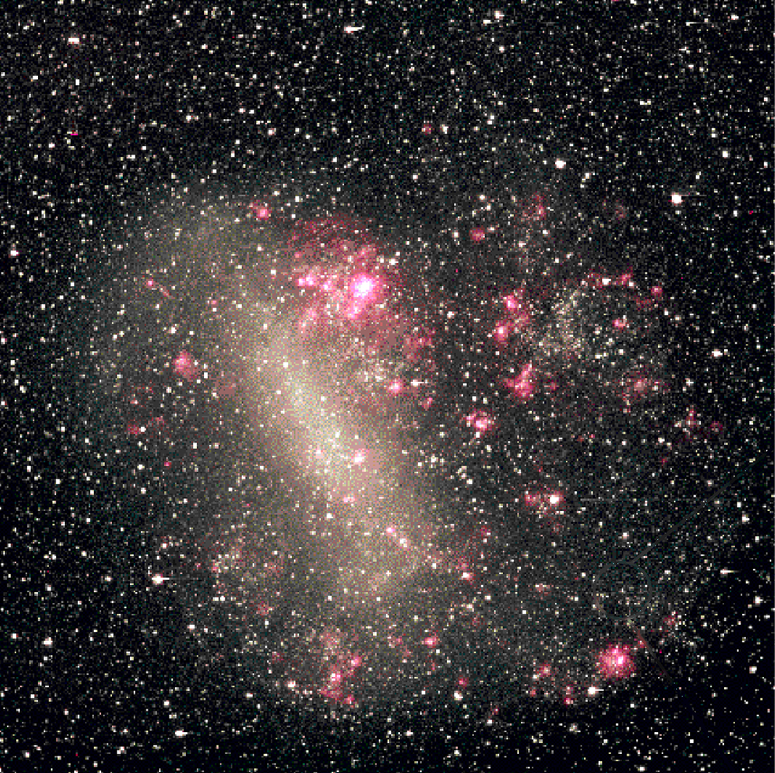

Hot white dwarf shines in young star cluster (Ground based view of the area containing NGC 1818)

Ground-based image of the Large Magellanic Cloud.

Credit: NASA & ESA